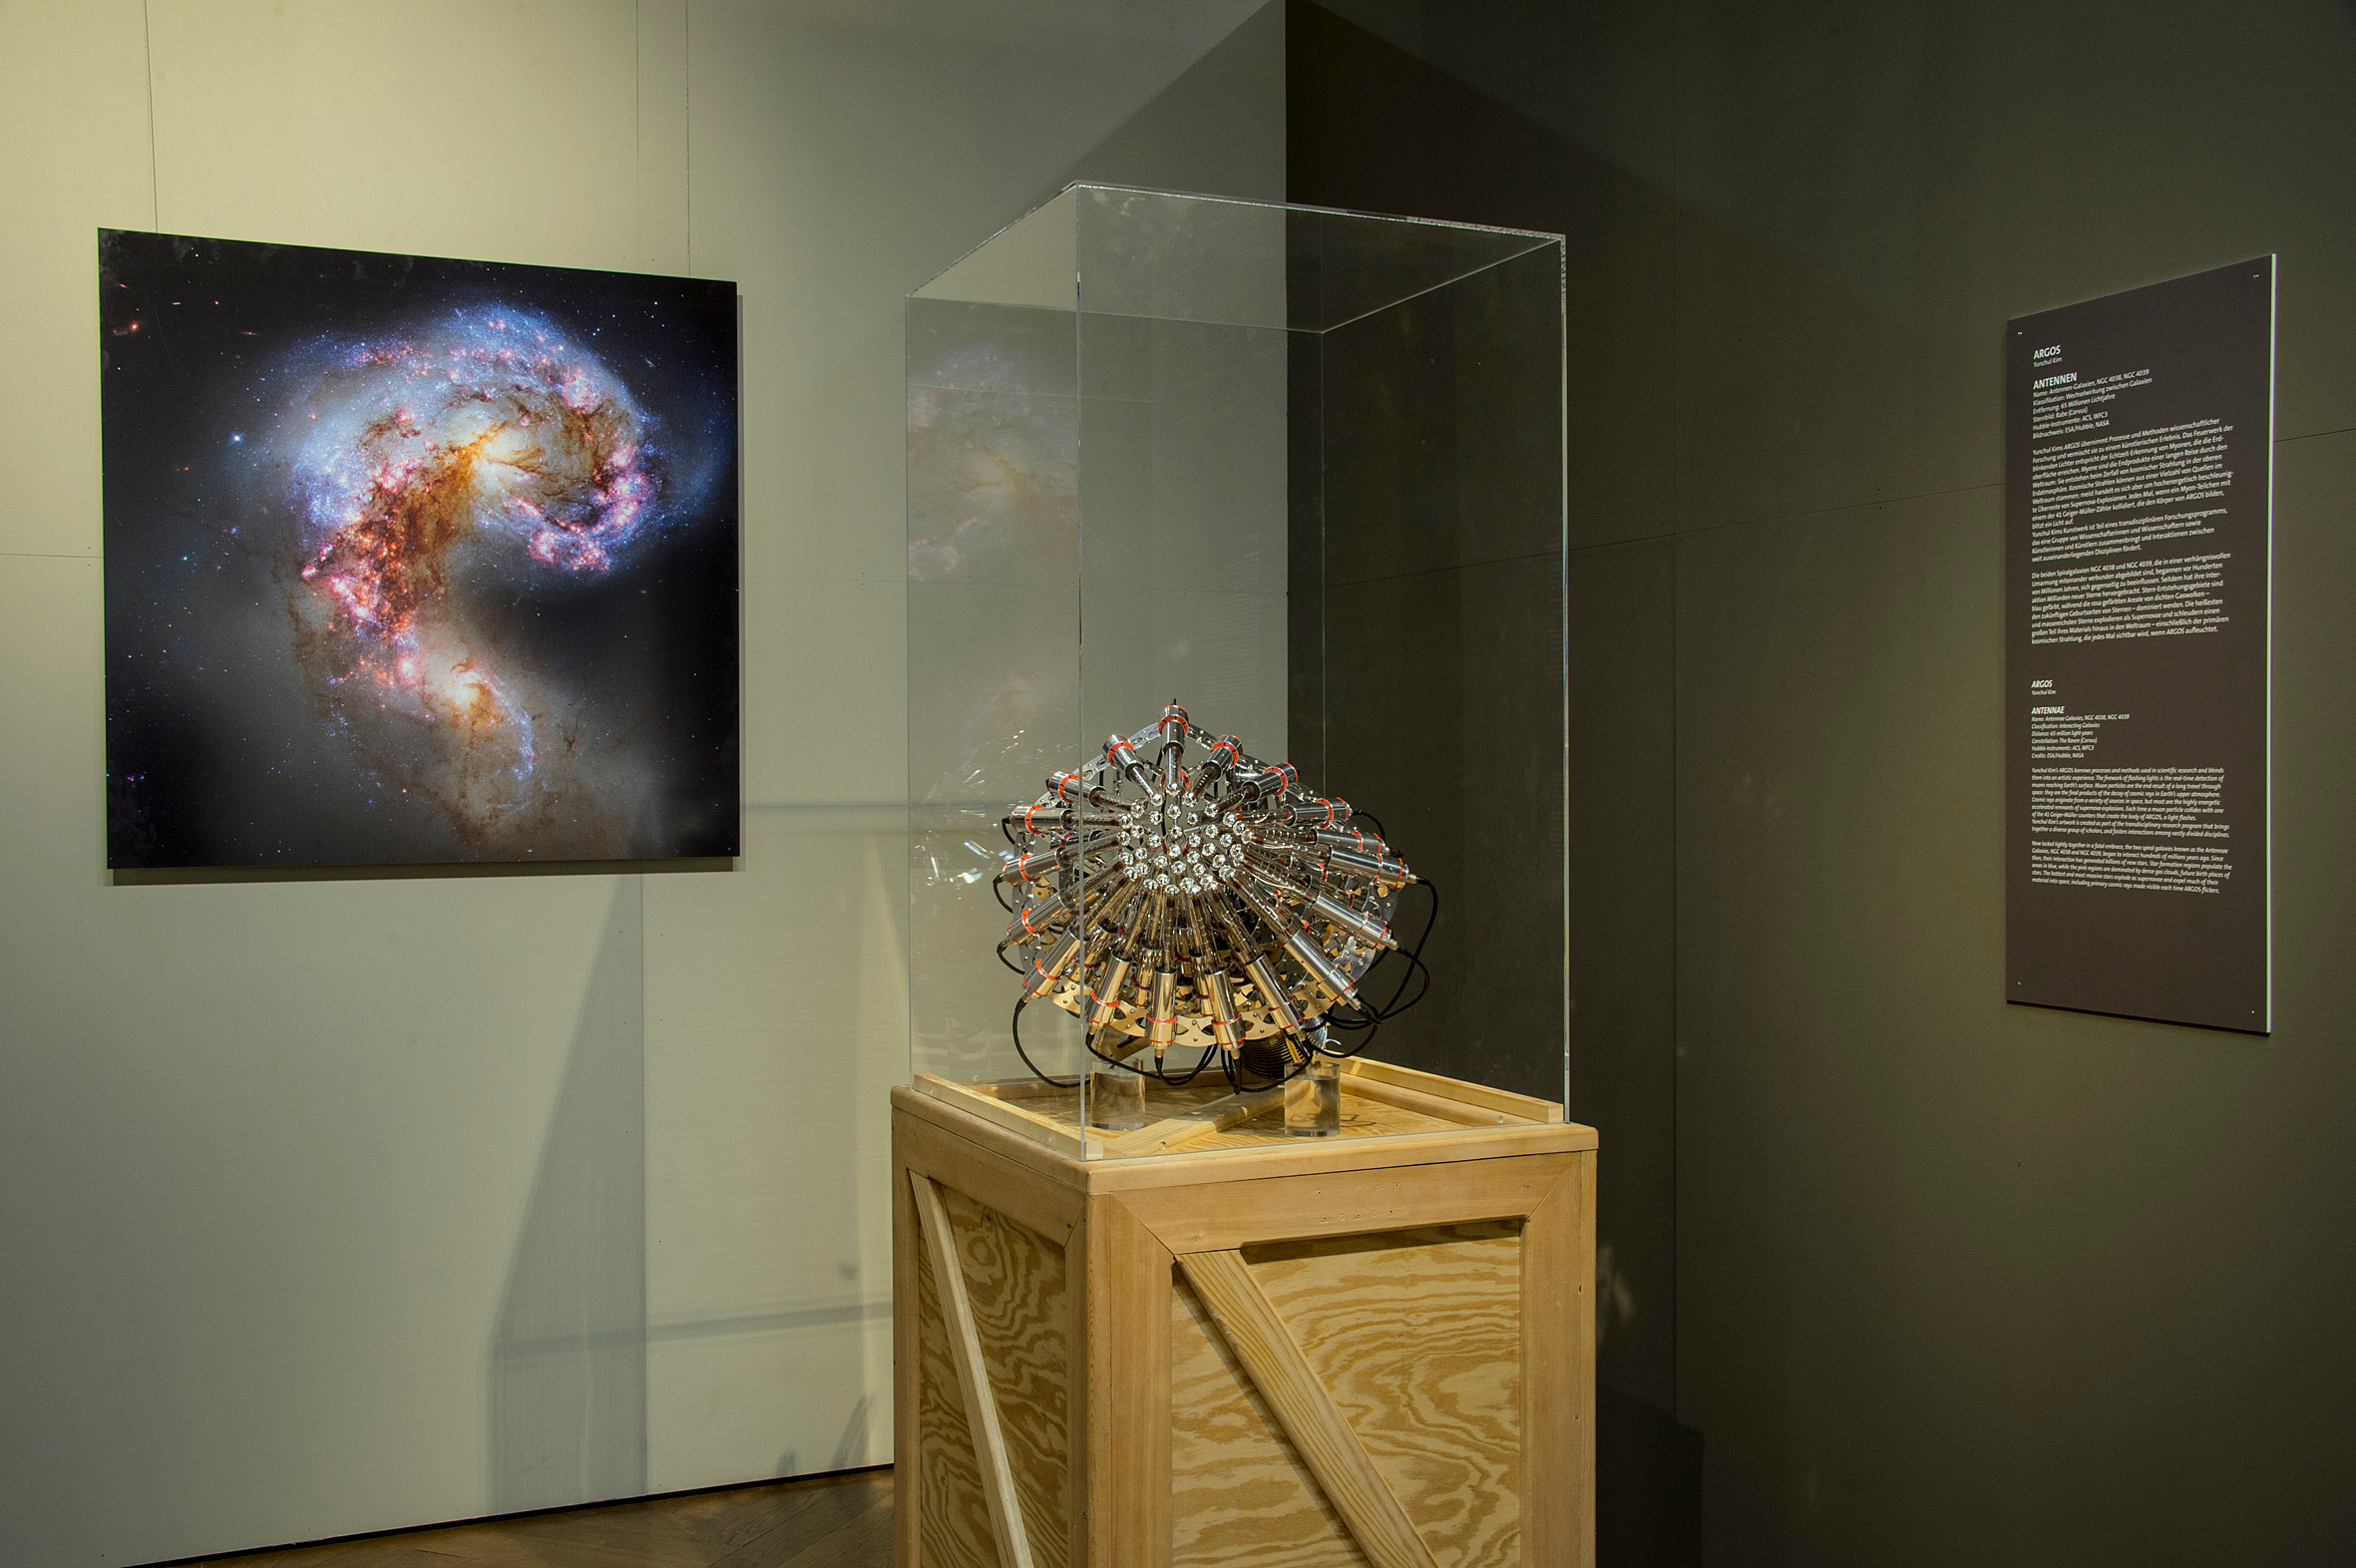

Cosmic light

Yunchul Kim's ARGOS takes processes and methods of scientific research and mixes them into an artistic experience. The fireworks of flashing lights visible in his installation correspond to real time detection of muons reaching Earth's surface.

Muons are created by decay of cosmic radiation in the upper atmosphere. Cosmic rays can come from a variety of sources in space; but most of them are high-energy remnants of supernovae explosions. Every time a muon collides with one of the 41 Geier-Müller counters in the ARGOS installation, a light flashes.

The installation is part of the Hubble travelling exhibition Our Place in Space.

Credit: NHM Wien, Kurt Kracher